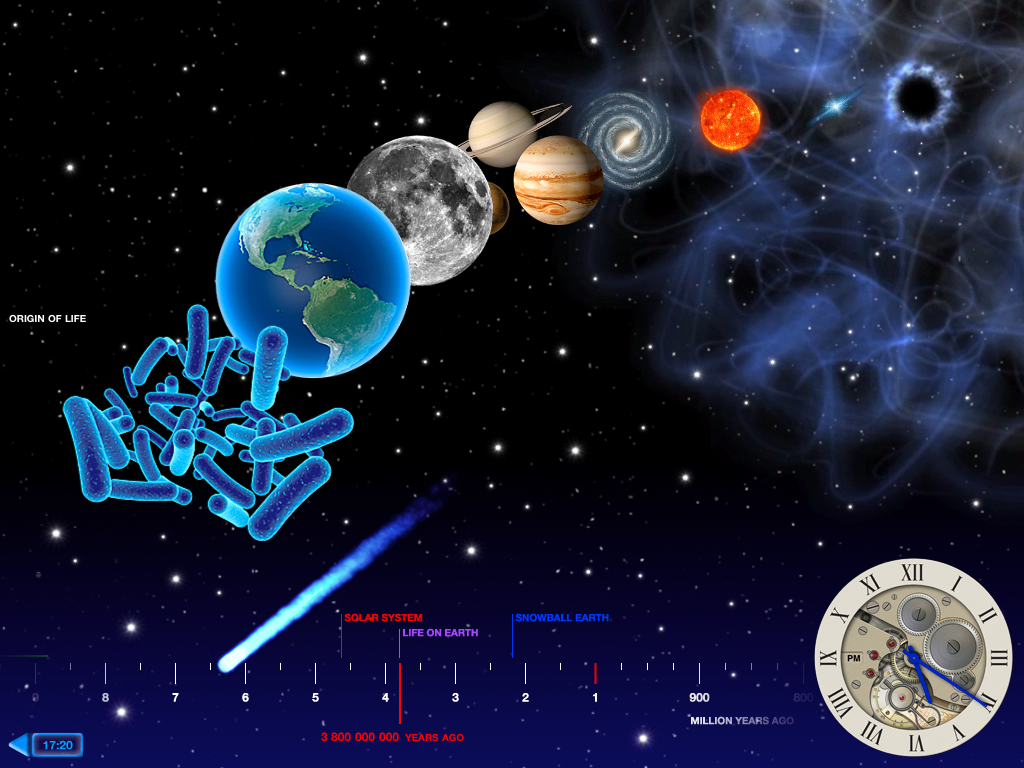

Screenshot of the Back in Time iPad app

The Back in Time app is an animated history e-book that guides the reader through time from the first moments of the Universe’s history until the most recent events. The New York Times has included the Back in Time app, developed by the company Landka among its Top10 iPad apps in 2011. ESA/Hubble went into partnership with Landka to deliver content for this educational app, contributing images and animations for the first four chapters: The Big Bang, The First Stars, The Milky Way and The Solar System.

You can buy the app in the Apple App Store.

Credit: ESO/Landka